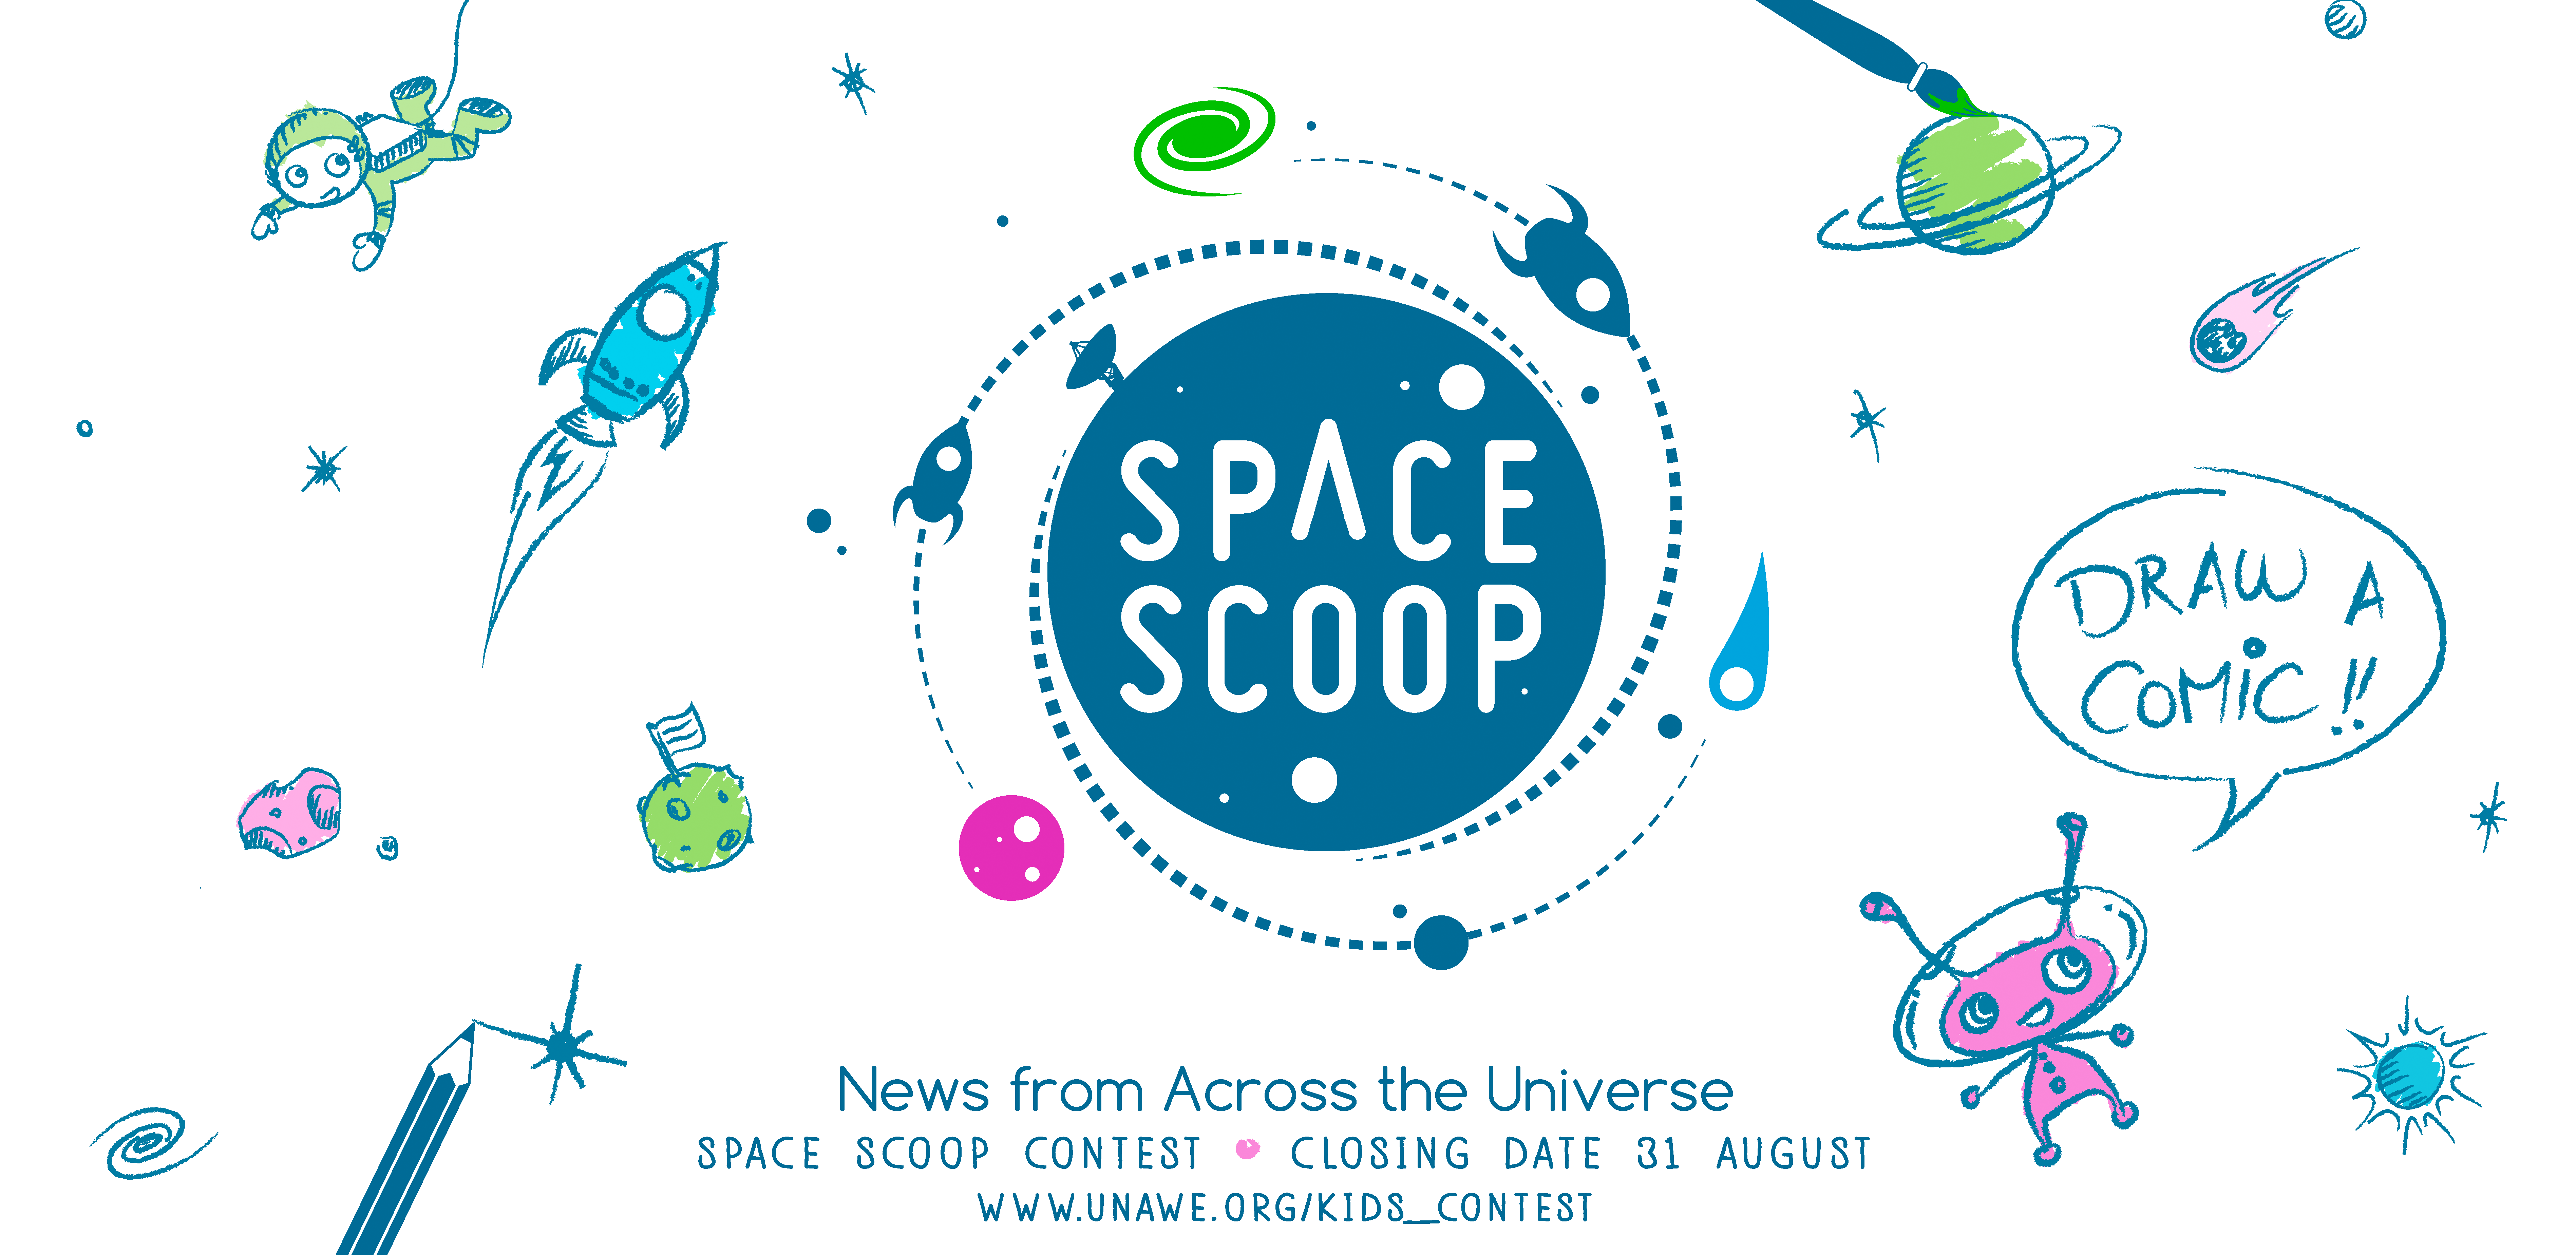

Space Scoop comic contest

Banner created for the Space Scoop comic contest to celebrate the 10th anniversary of the Universe Awareness project.

Credit: Space Scoop